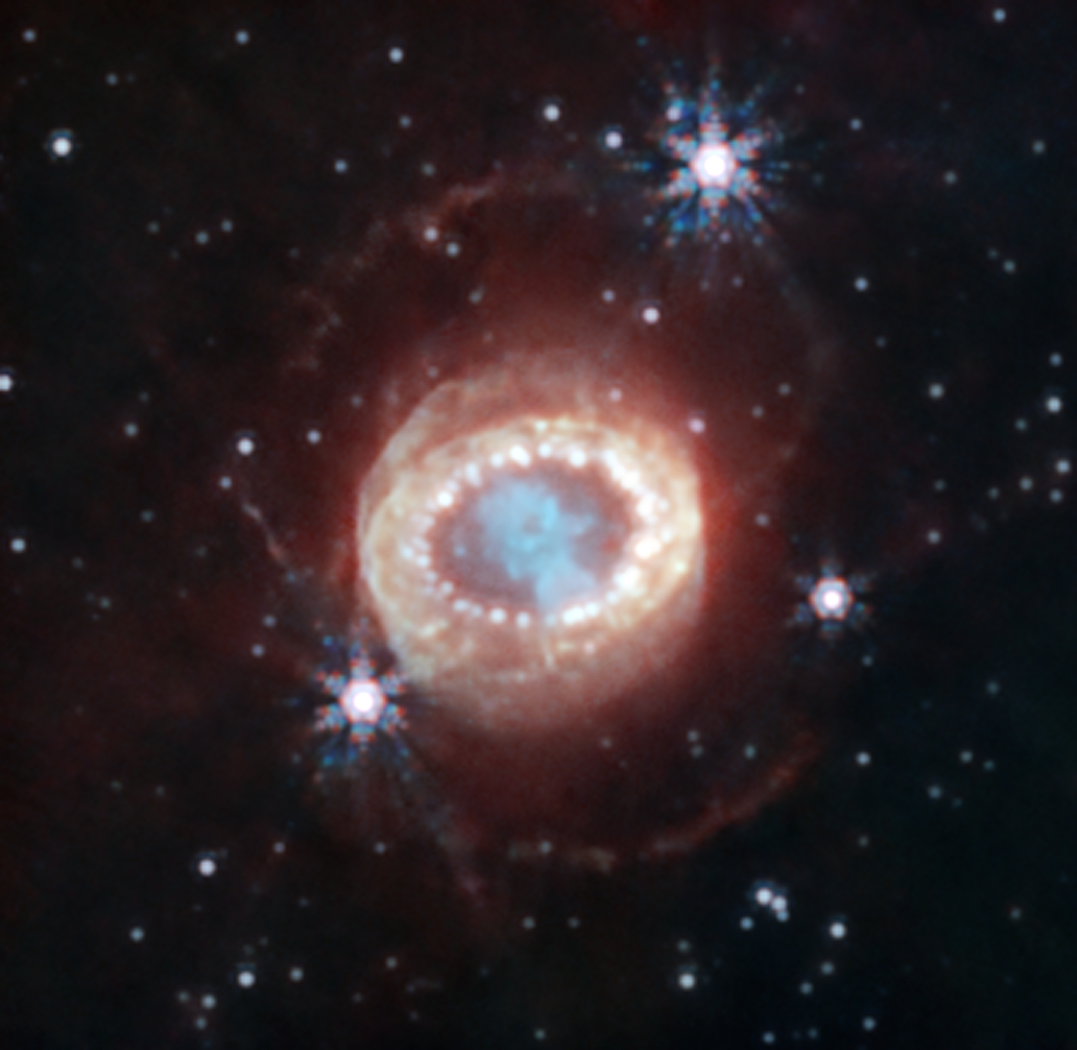

SN 1987A (NIRCam image)

The NASA/ESA/CSA James Webb Space Telescope has begun the study of one of the most renowned supernovae, SN 1987A (Supernova 1987A). Located 168,000 light-years away in the Large Magellanic Cloud, SN 1987A has been a target of intense observations at wavelengths ranging from gamma rays to radio for nearly 40 years, since its discovery in February of 1987. New observations by Webb’s NIRCam (Near-Infrared Camera) provide a crucial clue to our understanding of how a supernova develops over time to shape its remnant.

This image reveals a central structure like a keyhole. This center is packed with clumpy gas and dust ejected by the supernova explosion. The dust is so dense that even near-infrared light that Webb detects can’t penetrate it, shaping the dark “hole” in the keyhole.

A bright, equatorial ring surrounds the inner keyhole, forming a band around the waist that connects two faint arms of hourglass-shaped outer rings. The equatorial ring, formed from material ejected tens of thousands of years before the supernova explosion, contains bright hot spots, which appeared as the supernova’s shock wave hit the ring. Now spots are found even exterior to the ring, with diffuse emission surrounding it. These are the locations of supernova shocks hitting more exterior material.

In this image blue represents light at 1.5 microns (F150W), cyan 1.64 and 2.0 microns (F164N, F200W), yellow 3.23 microns (F323N), orange 4.05 microns (F405N), and red 4.44 microns (F444W).

Credit: NASA, ESA, CSA, M. Matsuura (Cardiff University), R. Arendt (NASA’s Goddard Spaceflight Center & University of Maryland, Baltimore County), C. Fransson (Stockholm University), J. Larsson (KTH Royal Institute of Technology), A. Pagan (STScI)